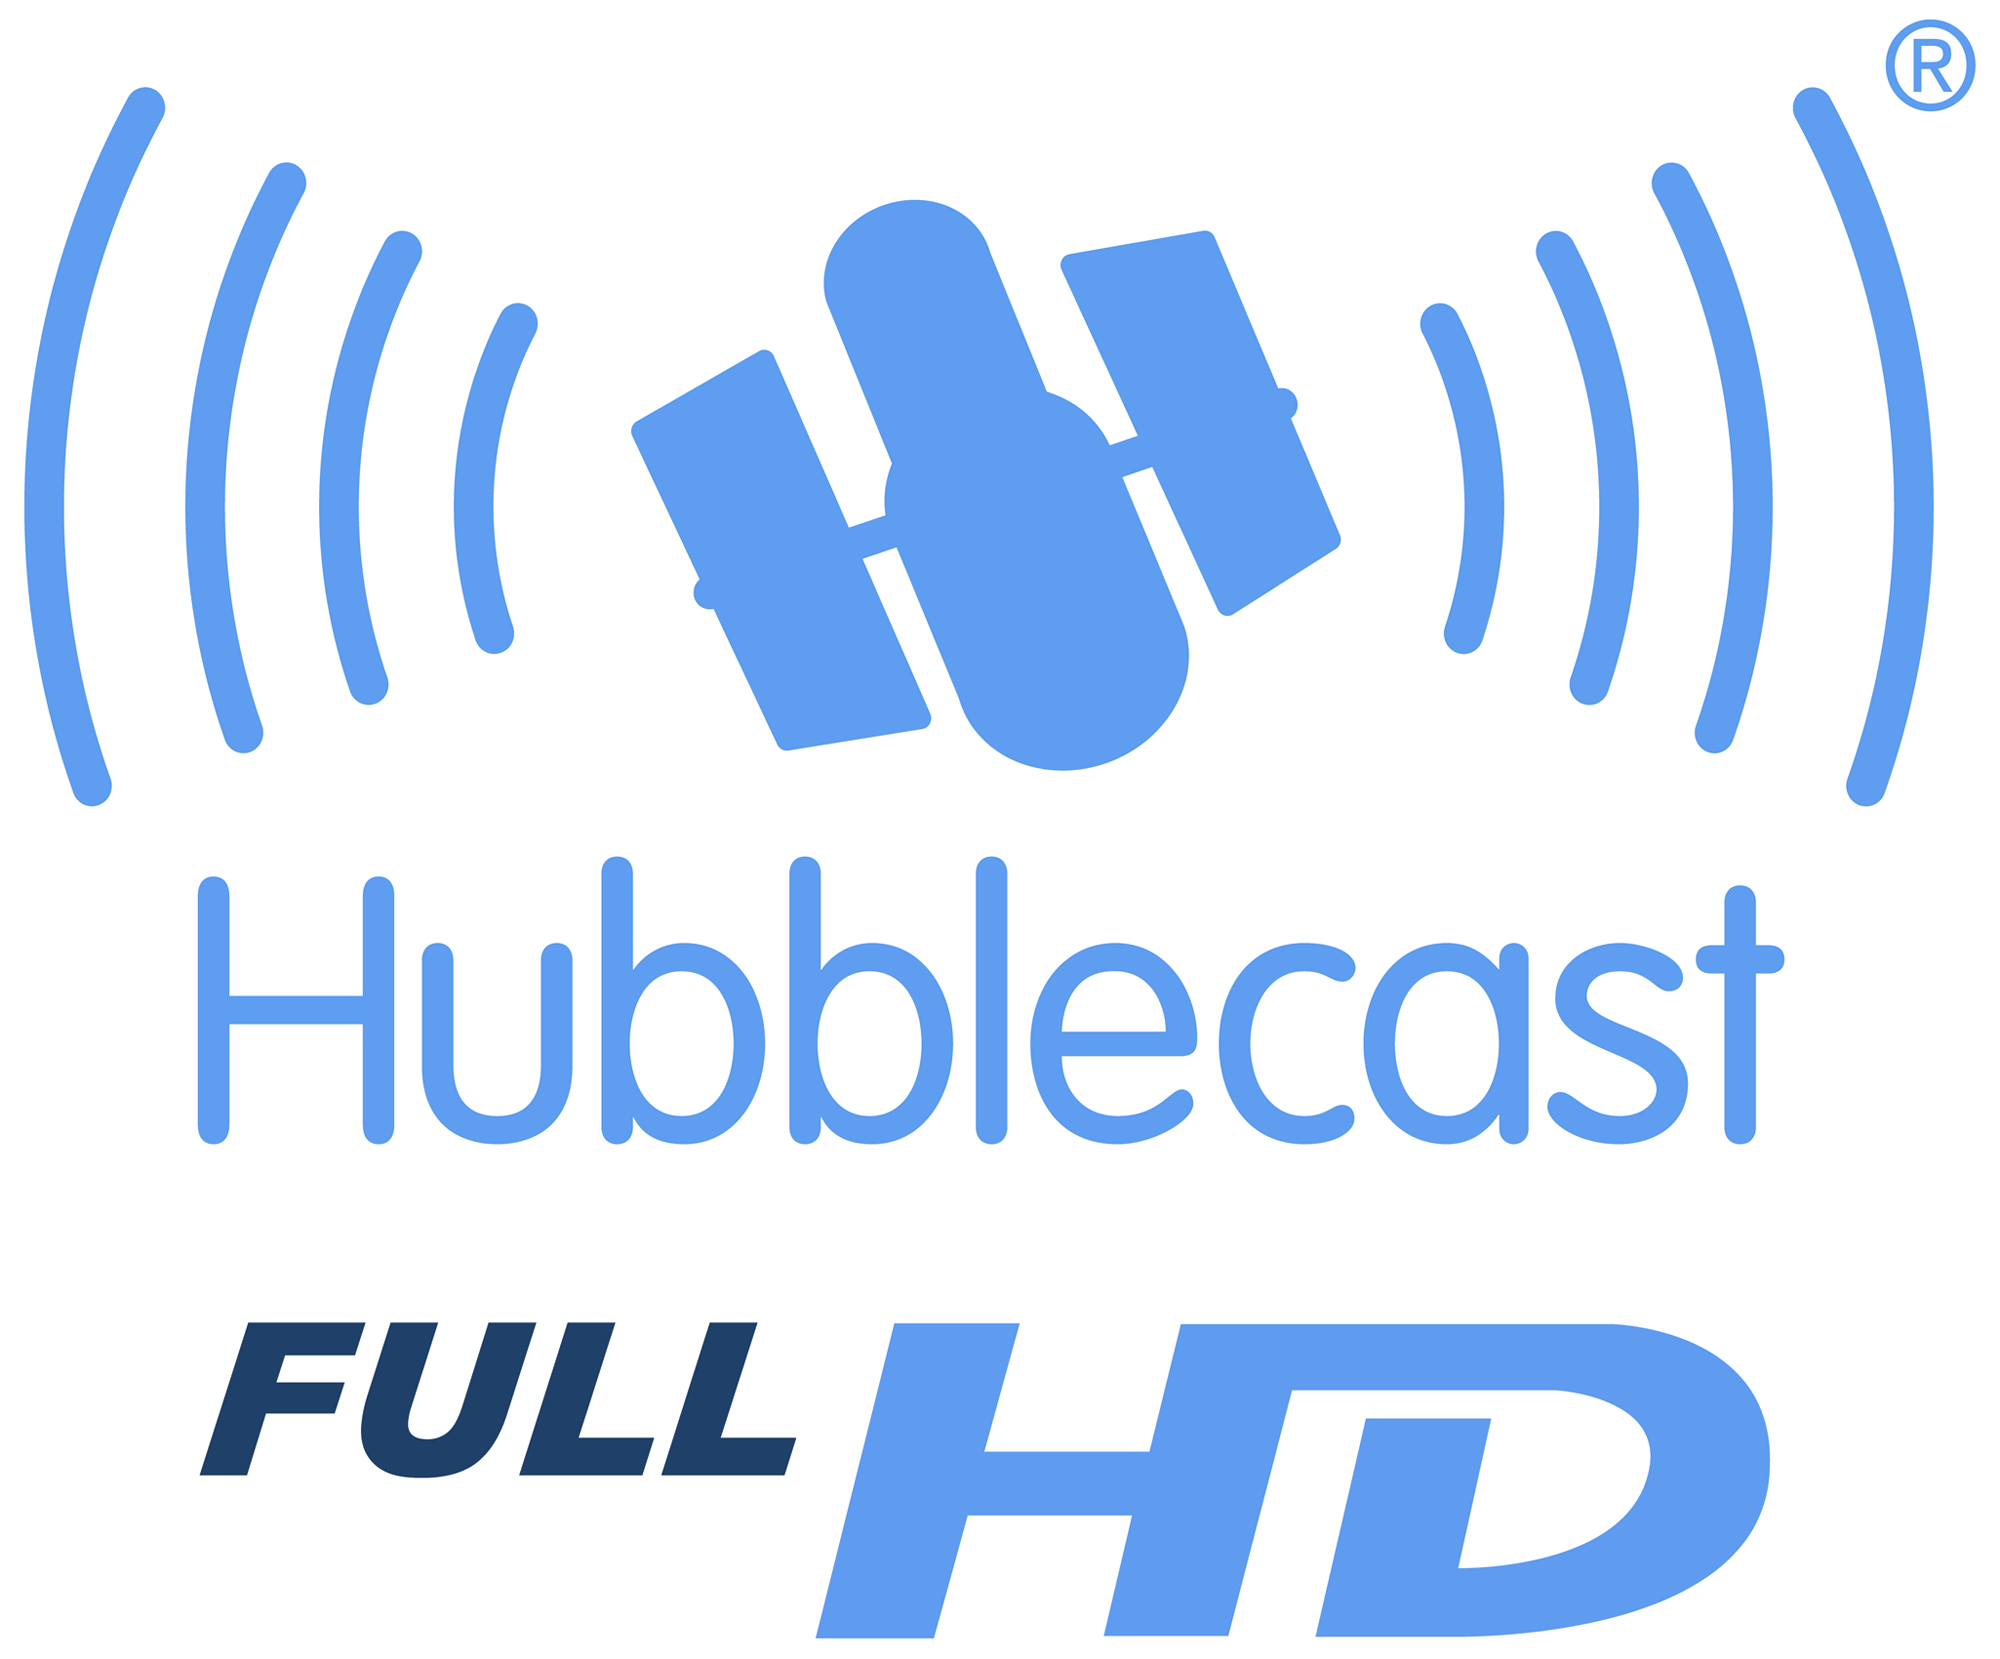

Hubblecast in Full HD!

The successful video podcast (vodcast) with cool news from the NASA/ESA Hubble Space Telescope, the Hubblecast, is now produced in Full High-Definition (Full HD) format. High-Definition is rapidly evolving into one of the leading video formats in the broadcasting market. This is the first time – to our knowledge – that a vodcast has been delivered in Full HD resolution and demonstrates the European Space Agency's dedication to maximising the return to European taxpayers on their initial investment in the telescope.

The Hubblecast features the latest and coolest news and images from the NASA/ESA Hubble Space Telescope and is hosted by the enthusiastic young Dr. J – the nickname for Dr. Joe Liske, a German astronomer working at the European Organisation for Astronomical Research in the Southern Hemisphere (ESO).

The Hubblecast has been embraced by thousands of viewers in its first three months of its life, and is regularly ranked among the 10 most-viewed science podcasts in the world. So far, the Hubblecast has been watched by more than 50,000 people across the world.

Full HD, also known as 1080p, is a video format with a staggering 1,080 lines of vertical resolution, and 1920 picture elements in the horizontal direction. The letter "p" stands for progressive scan, which means that the lines of each frame are drawn in sequence. Each frame consists of 1920 x 1080 pixels – some two million pixels in total, with a widescreen aspect ratio of 16:9.

Stay tuned and follow the latest news and views from the NASA/ESA Hubble Space Telescope in cutting-edge Full HD quality!

Credit: NASA & ESA